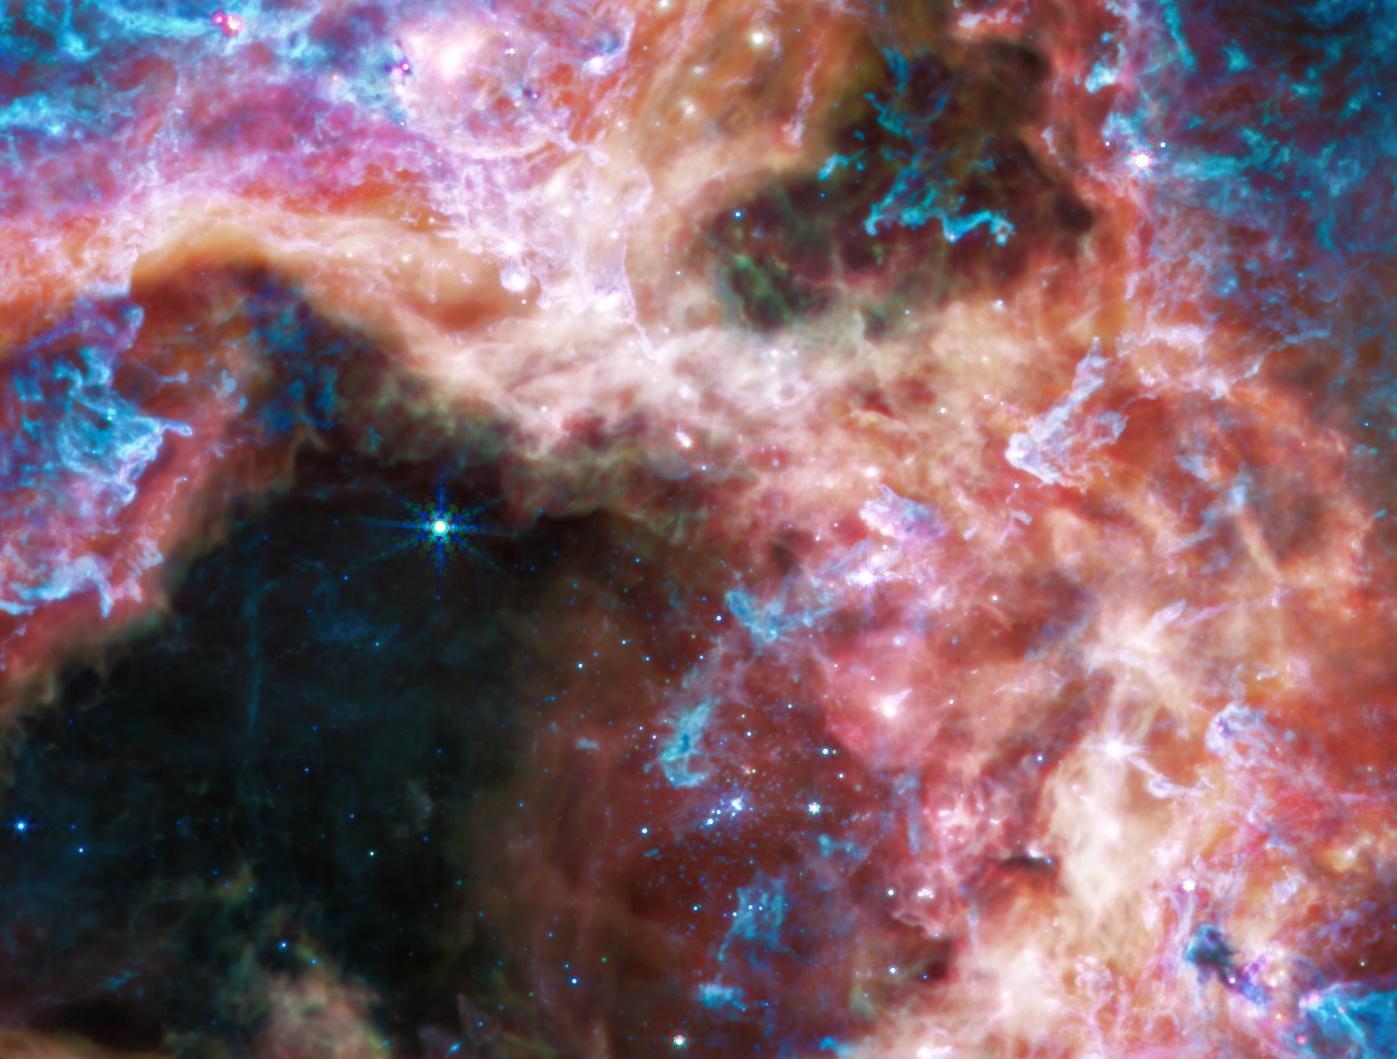

Tarantula Nebula (MIRI Image)

At the longer wavelengths of light captured by its Mid-Infrared Instrument (MIRI), Webb focuses on the area surrounding the central star cluster and unveils a very different view of the Tarantula Nebula. In this light, the young hot stars of the cluster fade in brilliance, and glowing gas and dust come forward. Abundant hydrocarbons light up the surfaces of the dust clouds, shown in blue and purple. Much of the nebula takes on a more ghostly, diffuse appearance because mid-infrared light is able to show more of what is happening deeper inside the clouds. Still-embedded protostars pop into view within their dusty cocoons, including a bright group at the very top edge of the image, left of centre.

Other areas appear dark, like in the lower-right corner of the image. This indicates the densest areas of dust in the nebula, that even mid-infrared wavelengths cannot penetrate. These could be the sites of future, or current, star formation.

MIRI was contributed by ESA and NASA, with the instrument designed and built by a consortium of nationally funded European Institutes (The MIRI European Consortium) in partnership with JPL and the University of Arizona.

Credit: NASA, ESA, CSA, and STScI